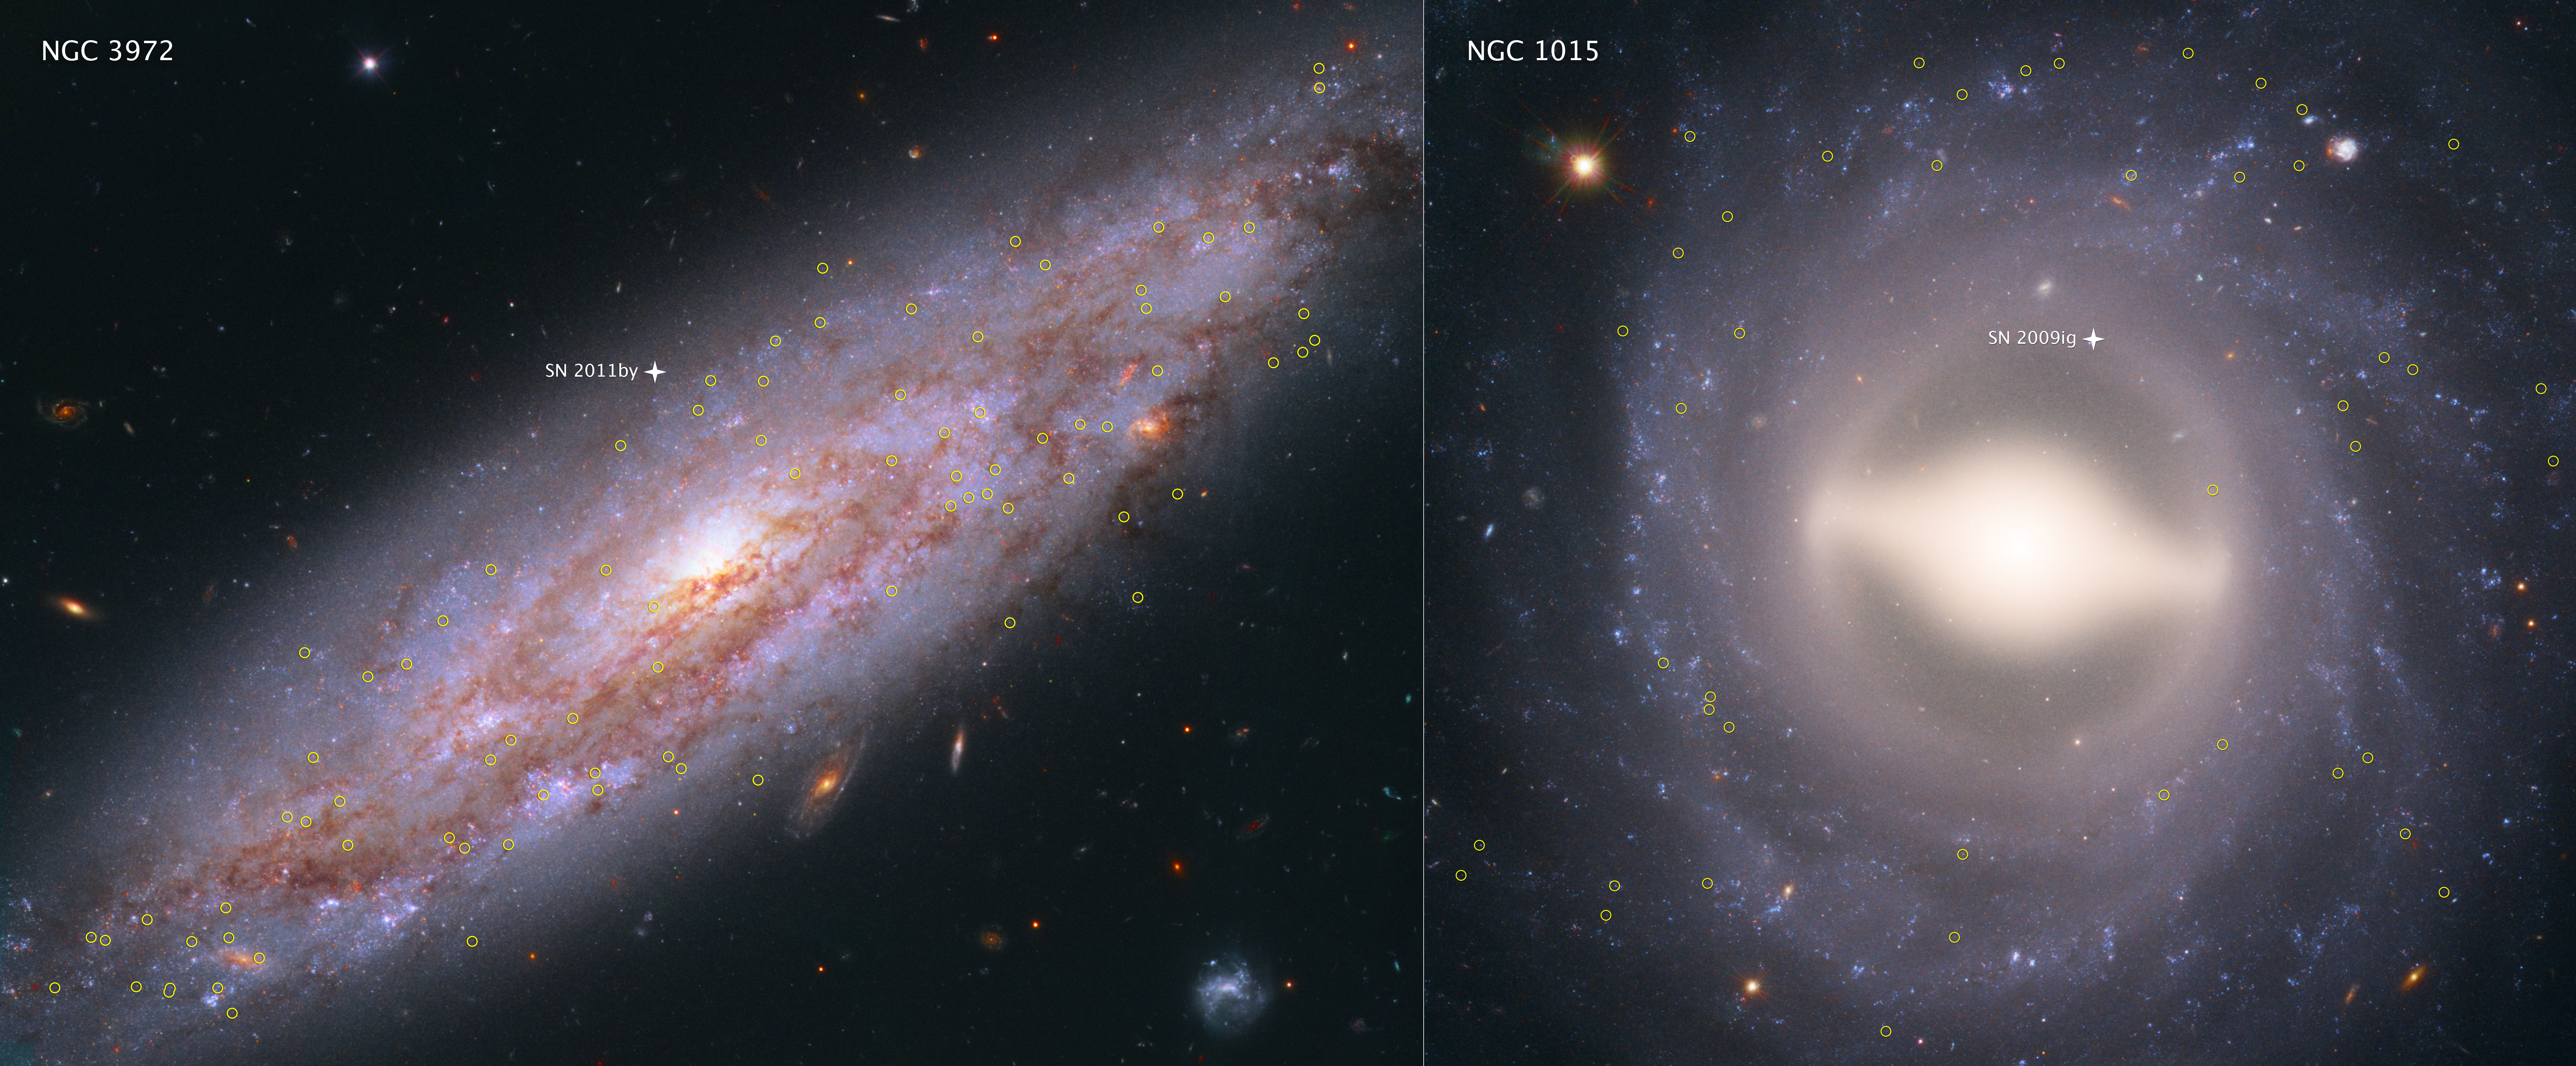

NGC 3972 and NGC 1015

These images from the NASA/ESA Hubble Space Telescope showcase 2 of the 19 galaxies analysed in a project to improve the precision of the Universe's expansion rate, a value known as the Hubble constant.

The colour-composite images show NGC 3972 (left) and NGC 1015 (right), located 65 million light-years and 118 million light-years, respectively, from Earth. The yellow circles in each galaxy represent the locations of pulsating stars called Cepheid variables. These stars blink at a rate matched closely by their intrinsic brightness, making them ideal cosmic lighthouses for measuring accurate distances to relatively nearby galaxies.

Another reliable milepost marker is a special class of exploding star called a Type Ia supernova. All of these supernovae peak at the same brightness and are brilliant enough to be seen over relatively longer distances. The small cross-shaped feature in each galaxy denotes the location of a Type Ia supernova.

Astronomers search for Cepheid variables in nearby galaxies containing a Type Ia supernova so they can compare the true brightness of both types of stars. That brightness information is used to calibrate the luminosity of Type Ia supernovae in far-flung galaxies so that astronomers can calculate the galaxies' distances from Earth. Once astronomers know accurate distances to galaxies near and far, they can determine and refine the universe's expansion rate.

The observations for NGC 3972 were taken in 2015; for NGC 1015 in 2013. Both galaxies were observed by Hubble's Wide Field Camera 3.

Credit: NASA, ESA, A. Riess (STScI/JHU)